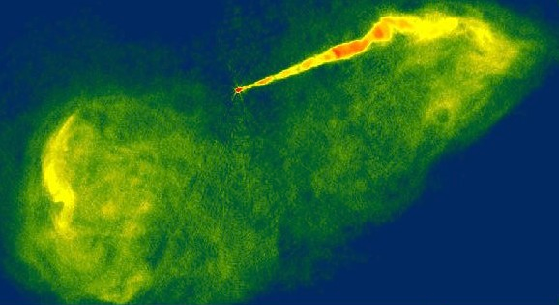

Close-up look at a jet near a black hole in galaxy M87 (ground-based view)

This radio image of the galaxy M 87, taken with the Very Large Array (VLA) radio telescope in February 1989, shows giant bubble-like structures where radio emission is thought to be powered by the jets of subatomic particles coming from the the galaxy's central black hole.

The false colour corresponds to the intensity of the radio energy being emitted by the jet. M 87 is located 50 million light-years away in the constellation Virgo.

Credit: National Radio Astronomy Observatory/National Science Foundation